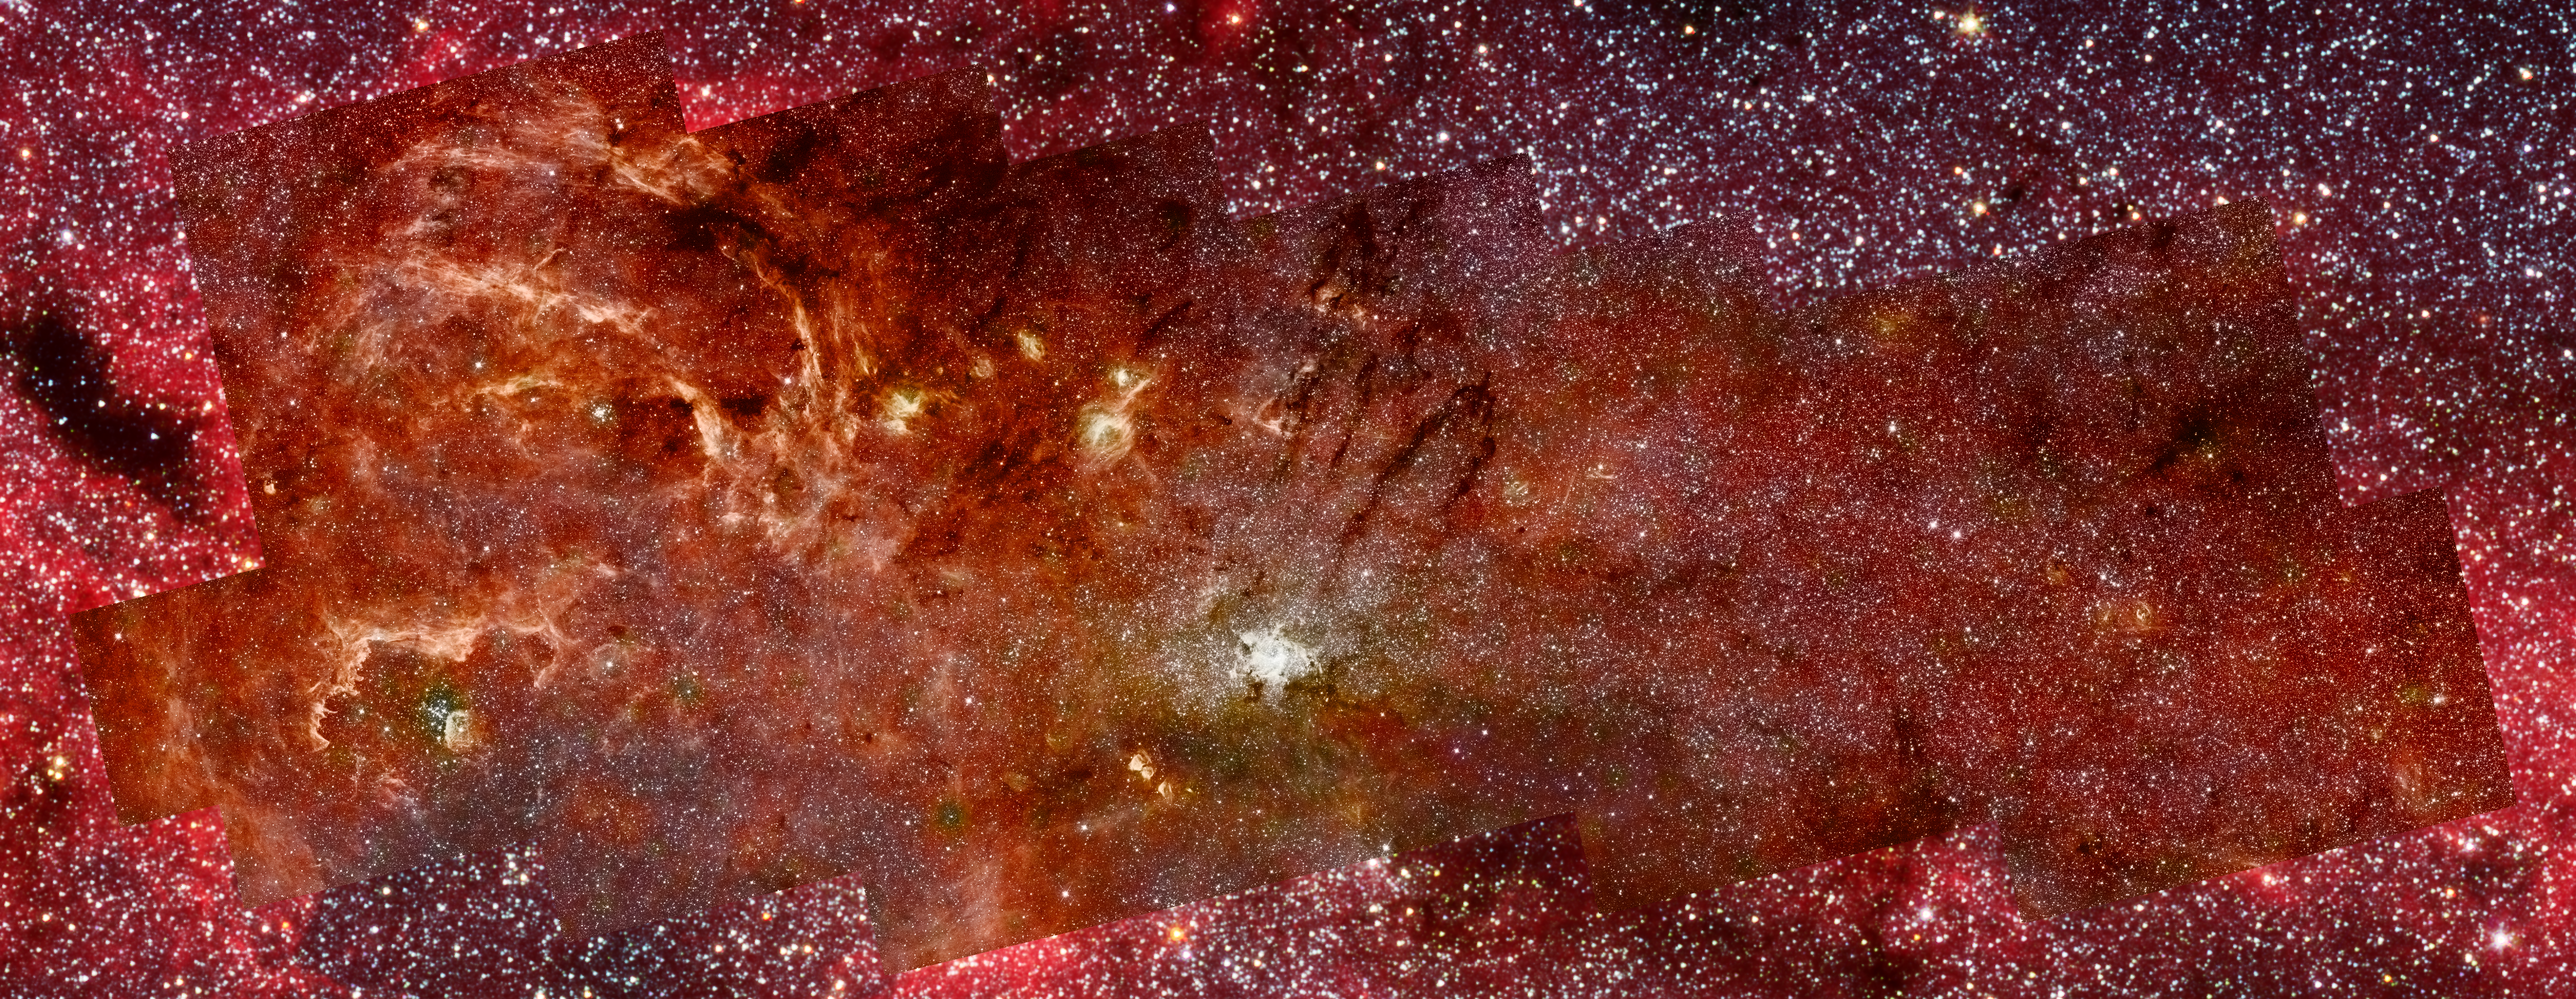

Hubble-Spitzer composite of the galactic centre (full-field)

This composite colour infrared image combines the sharp imaging of the Hubble Space Telescope's Near Infrared Camera and Multi-Object Spectrometer (NICMOS) with colour imagery from a previous Spitzer Space Telescope survey done with its Infrared Astronomy Camera (IRAC).

This combination gives a clear picture of the centre of the Milky Way galaxy and reveals a new population of massive stars and new details in the complex structures in the hot ionized gas swirling around the central 300 light-years

Credit: NASA, ESA, Q.D. Wang (University of Massachusetts, Amherst) and S. Stolovy (Caltech)